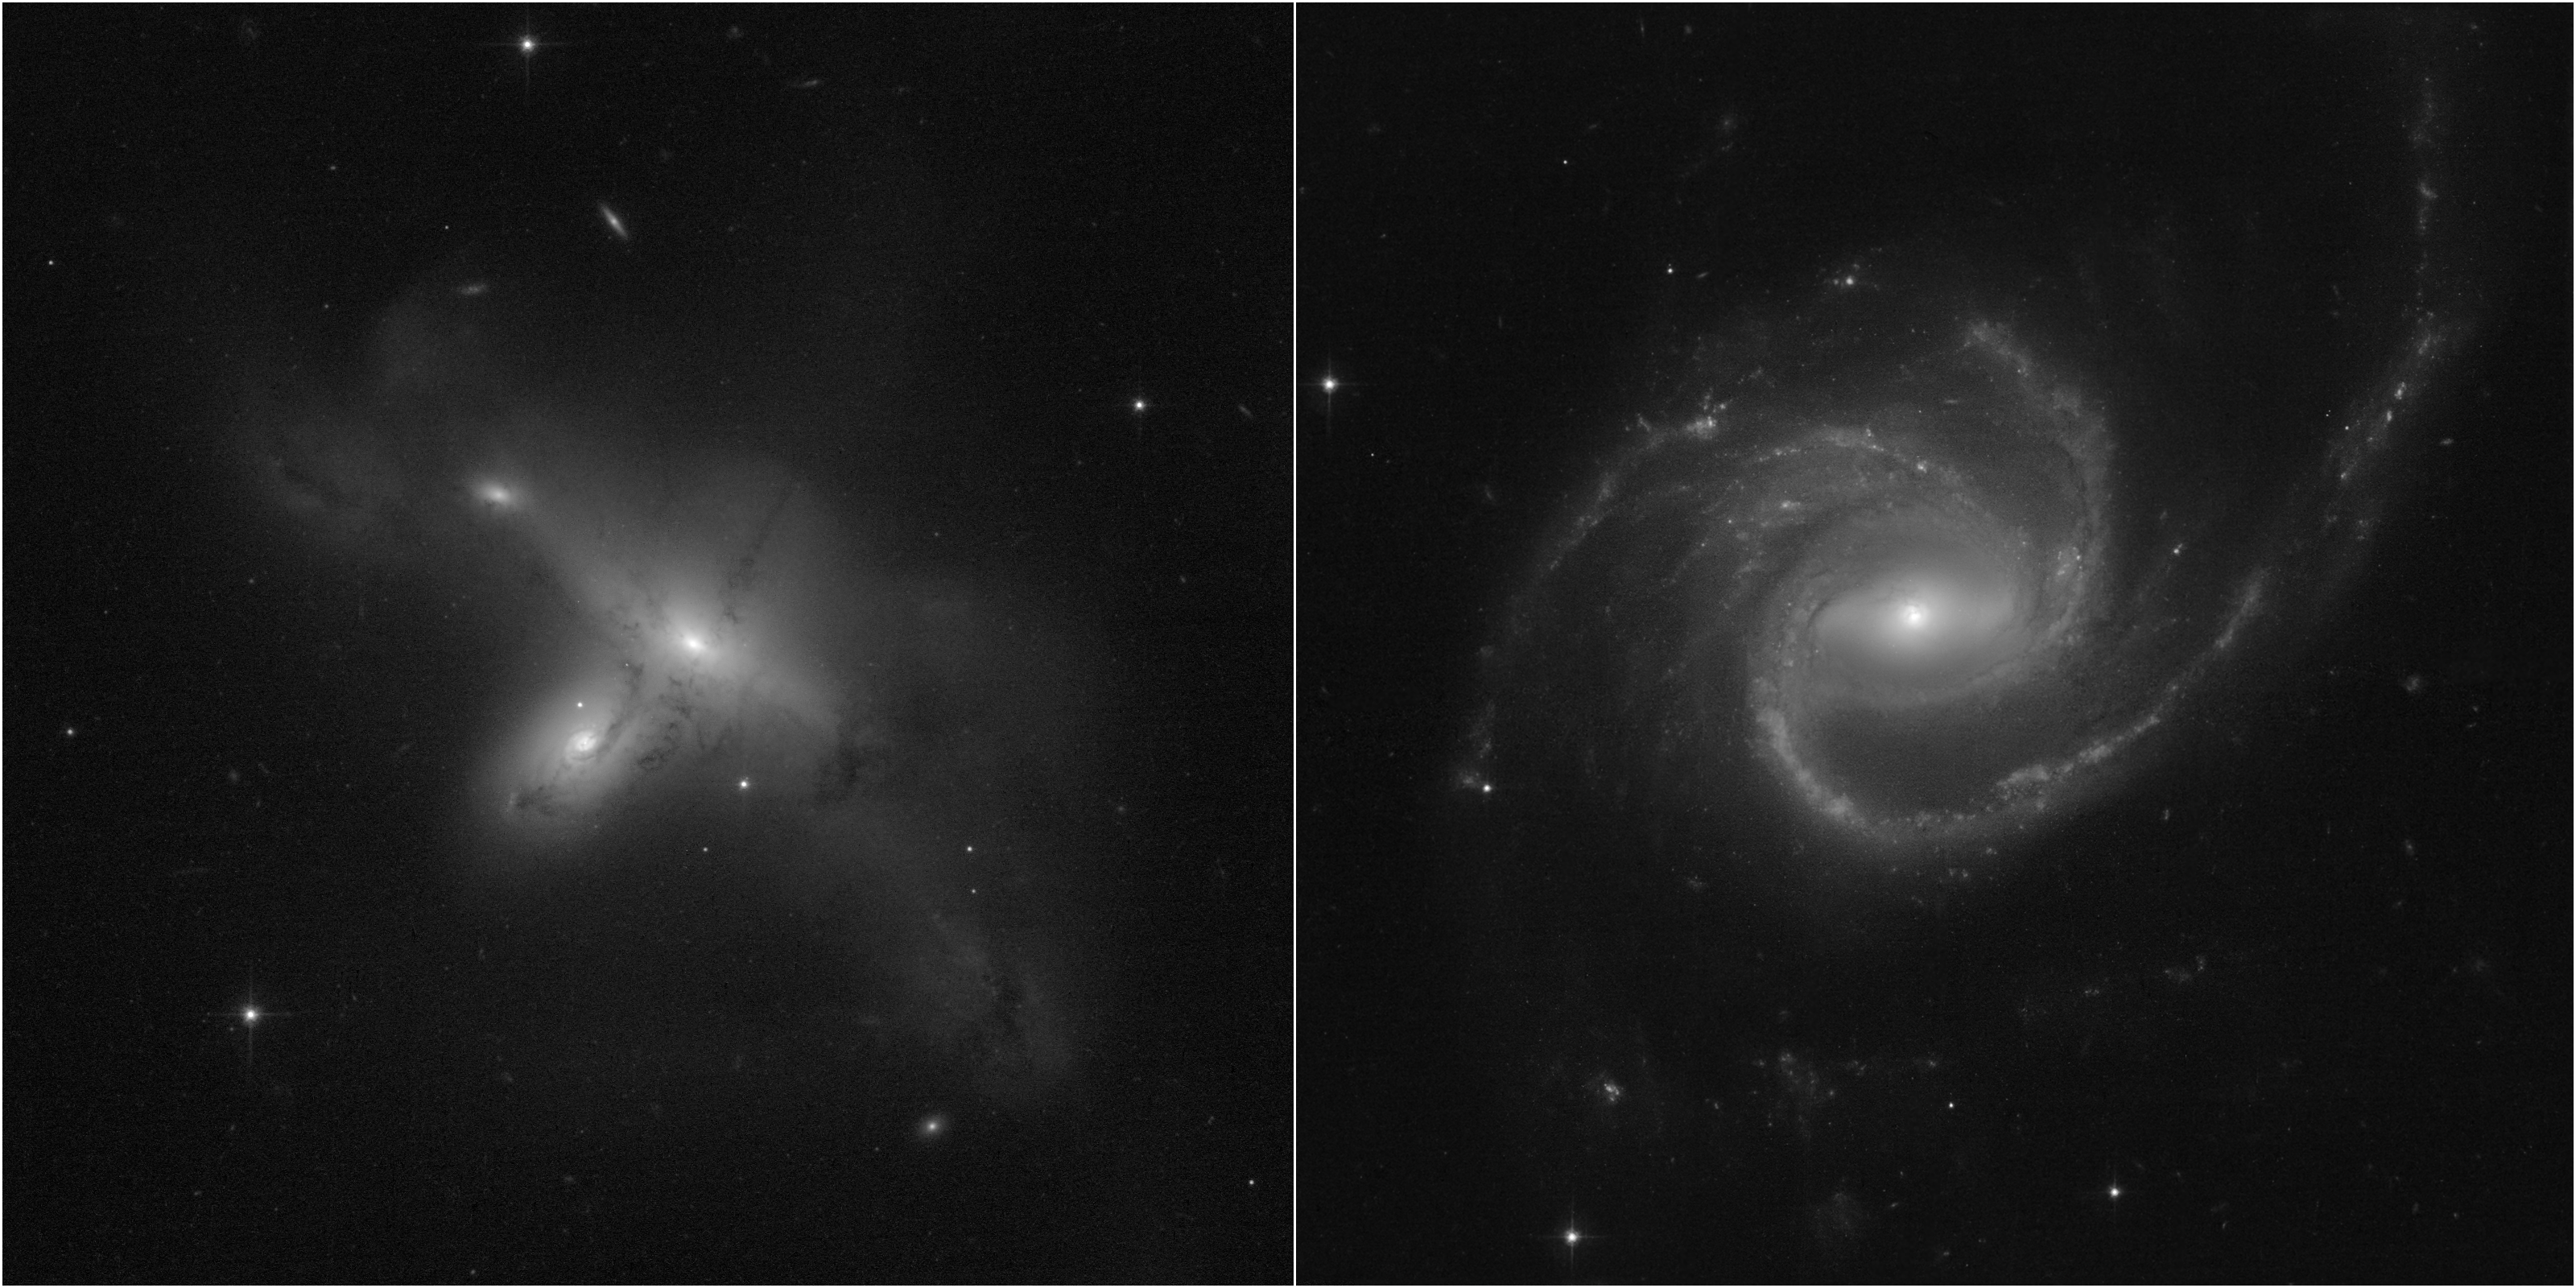

Hubble Returns to Science Operations

These early snapshots demonstrate the return of the NASA/ESA Hubble Space Telescope to full science operations, following correction of a computer anomaly aboard the spacecraft. Normal science observations were restarted on July 17, at 1:18 pm EDT. Among the early targets are globular star clusters in other galaxies and aurorae on the giant planet Jupiter, in addition to a look at bizarre galaxies.

These two peculiar galaxies are part of a program led by Julianne Dalcanton of the University of Washington in Seattle, to survey oddball galaxies scattered across the sky.

LEFT — ARP-MADORE2115-273 is a rare example of an interacting galaxy pair in the southern hemisphere. These Hubble observations provide Hubble's first high-resolution glimpse at this intriguing system, which is located 297 million light-years away. Astronomers had previously thought this was a "collisional ring" system due to the head-on merger of two galaxies. The new Hubble observations show that the ongoing interaction between the galaxies is far more complex, leaving behind a rich network of stars and dusty gas.

RIGHT — ARP-MADORE0002-503 is a large spiral galaxy with unusual, extended spiral arms, at a distance of 490 million light-years. Its arms extend out to a radius of 163,000 light-years, making it three times more expansive than our Milky Way Galaxy. While most disk galaxies have an even number of spiral arms, this one has three.

Credit: NASA, ESA, STScI, Julianne Dalcanton (UW), Alyssa Pagan (STScI)